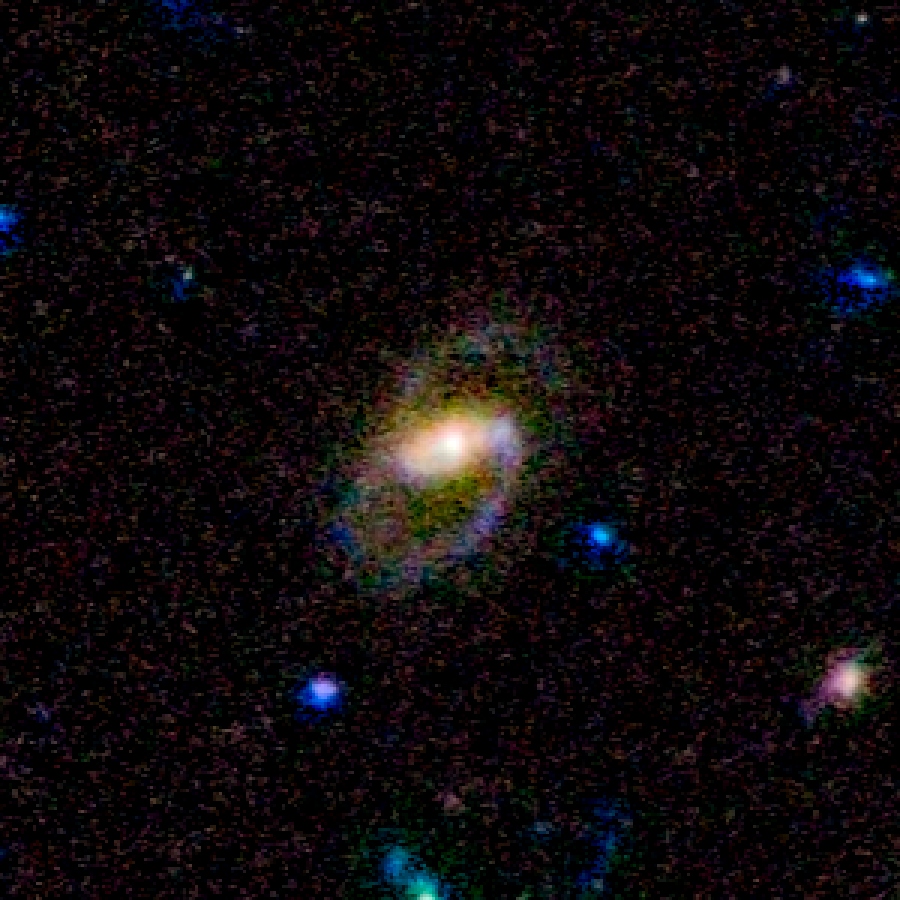

COSMOS Barred Spiral Galaxy 2607238

Barred spiral galaxy 2607238 is located 6.4 billion light-years away from Earth. The galaxy is part of a landmark study of more than 2,000 spiral galaxies from the largest galaxy census conducted by the Advanced Camera for Surveys aboard the NASA/ESA Hubble Space Telescope. The observations are part of the Cosmic Evolution Survey (COSMOS). Astronomers assembled this image from observations taken between fall 2003 and spring 2005 with Hubble and the Subaru Telescope in Mauna Kea, Hawaii.

Credit: NASA, ESA, K. Sheth (Spitzer Science Center, California Institute of Technology, Pasadena, California), and P. Capak and N. Scoville (California Institute of Technology)